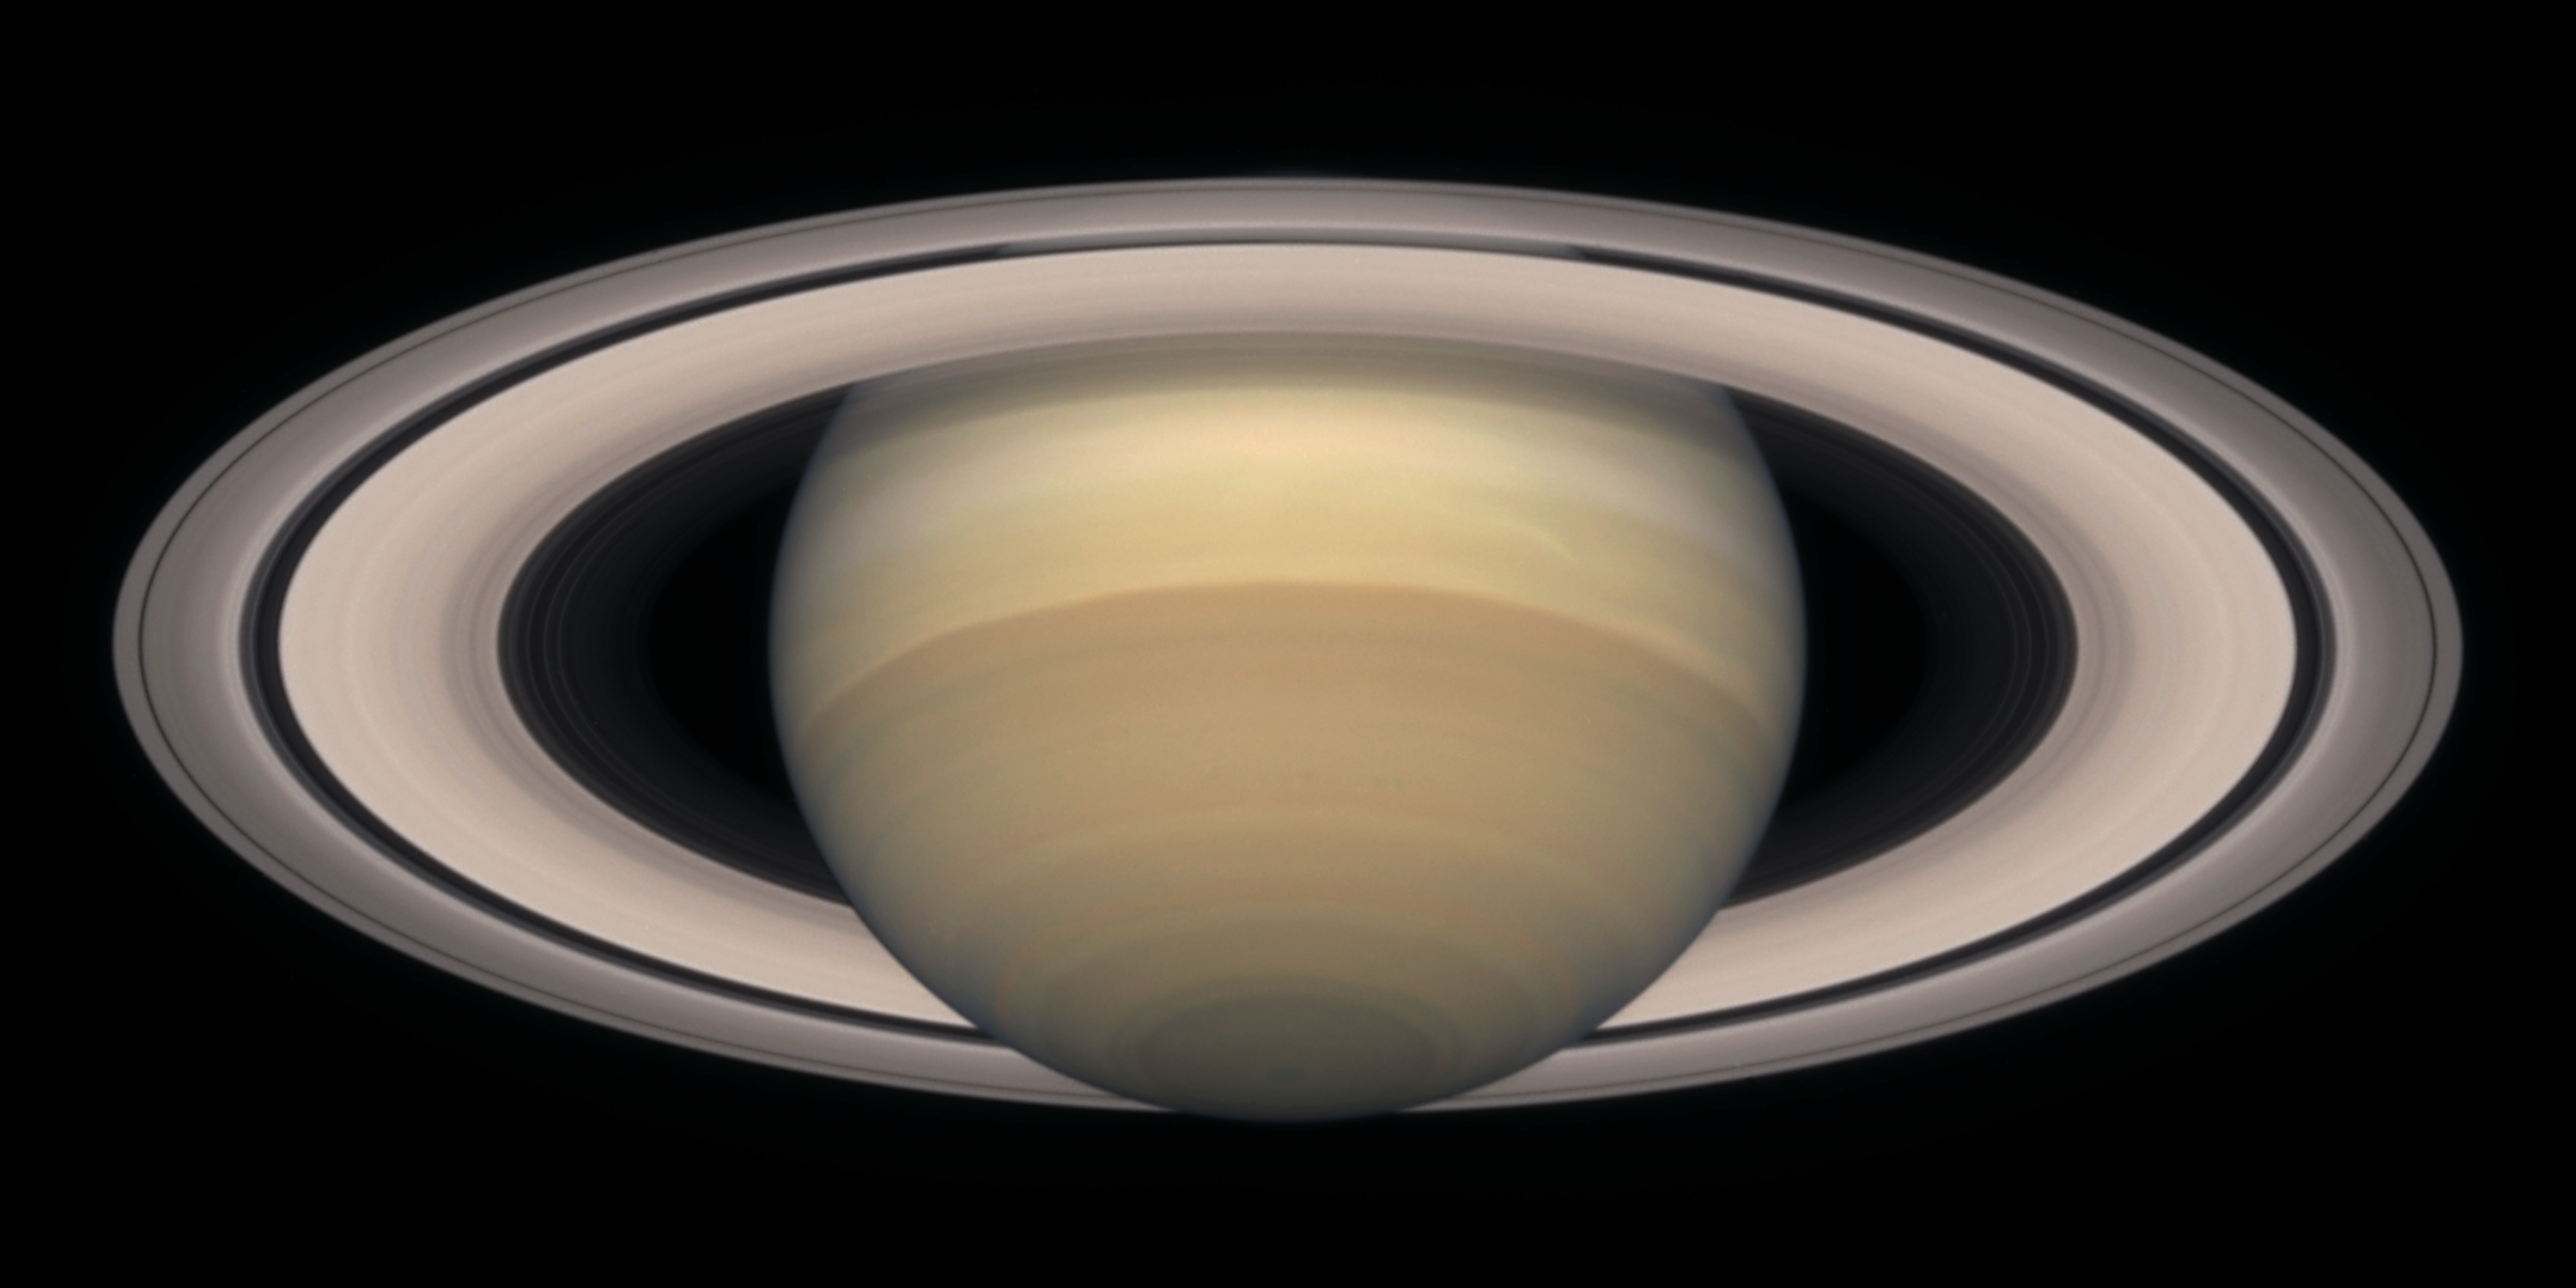

Saturn on November 2000

Saturn is about 75, 000 miles (120, 000 km) across, and is flattened at the poles because of its very rapid rotation. A day is only 10 hours long on Saturn. Strong winds account for the horizontal bands in the atmosphere of this giant gas planet.

The delicate colour variations in the clouds are due to smog in the upper atmosphere, produced when ultraviolet radiation from the Sun shines on methane gas. Deeper in the atmosphere, the visible clouds and gases merge gradually into hotter and denser gases, with no solid surface for visiting spacecraft to land on.

Credit: NASA/ESA and The Hubble Heritage Team STScI/AURA)